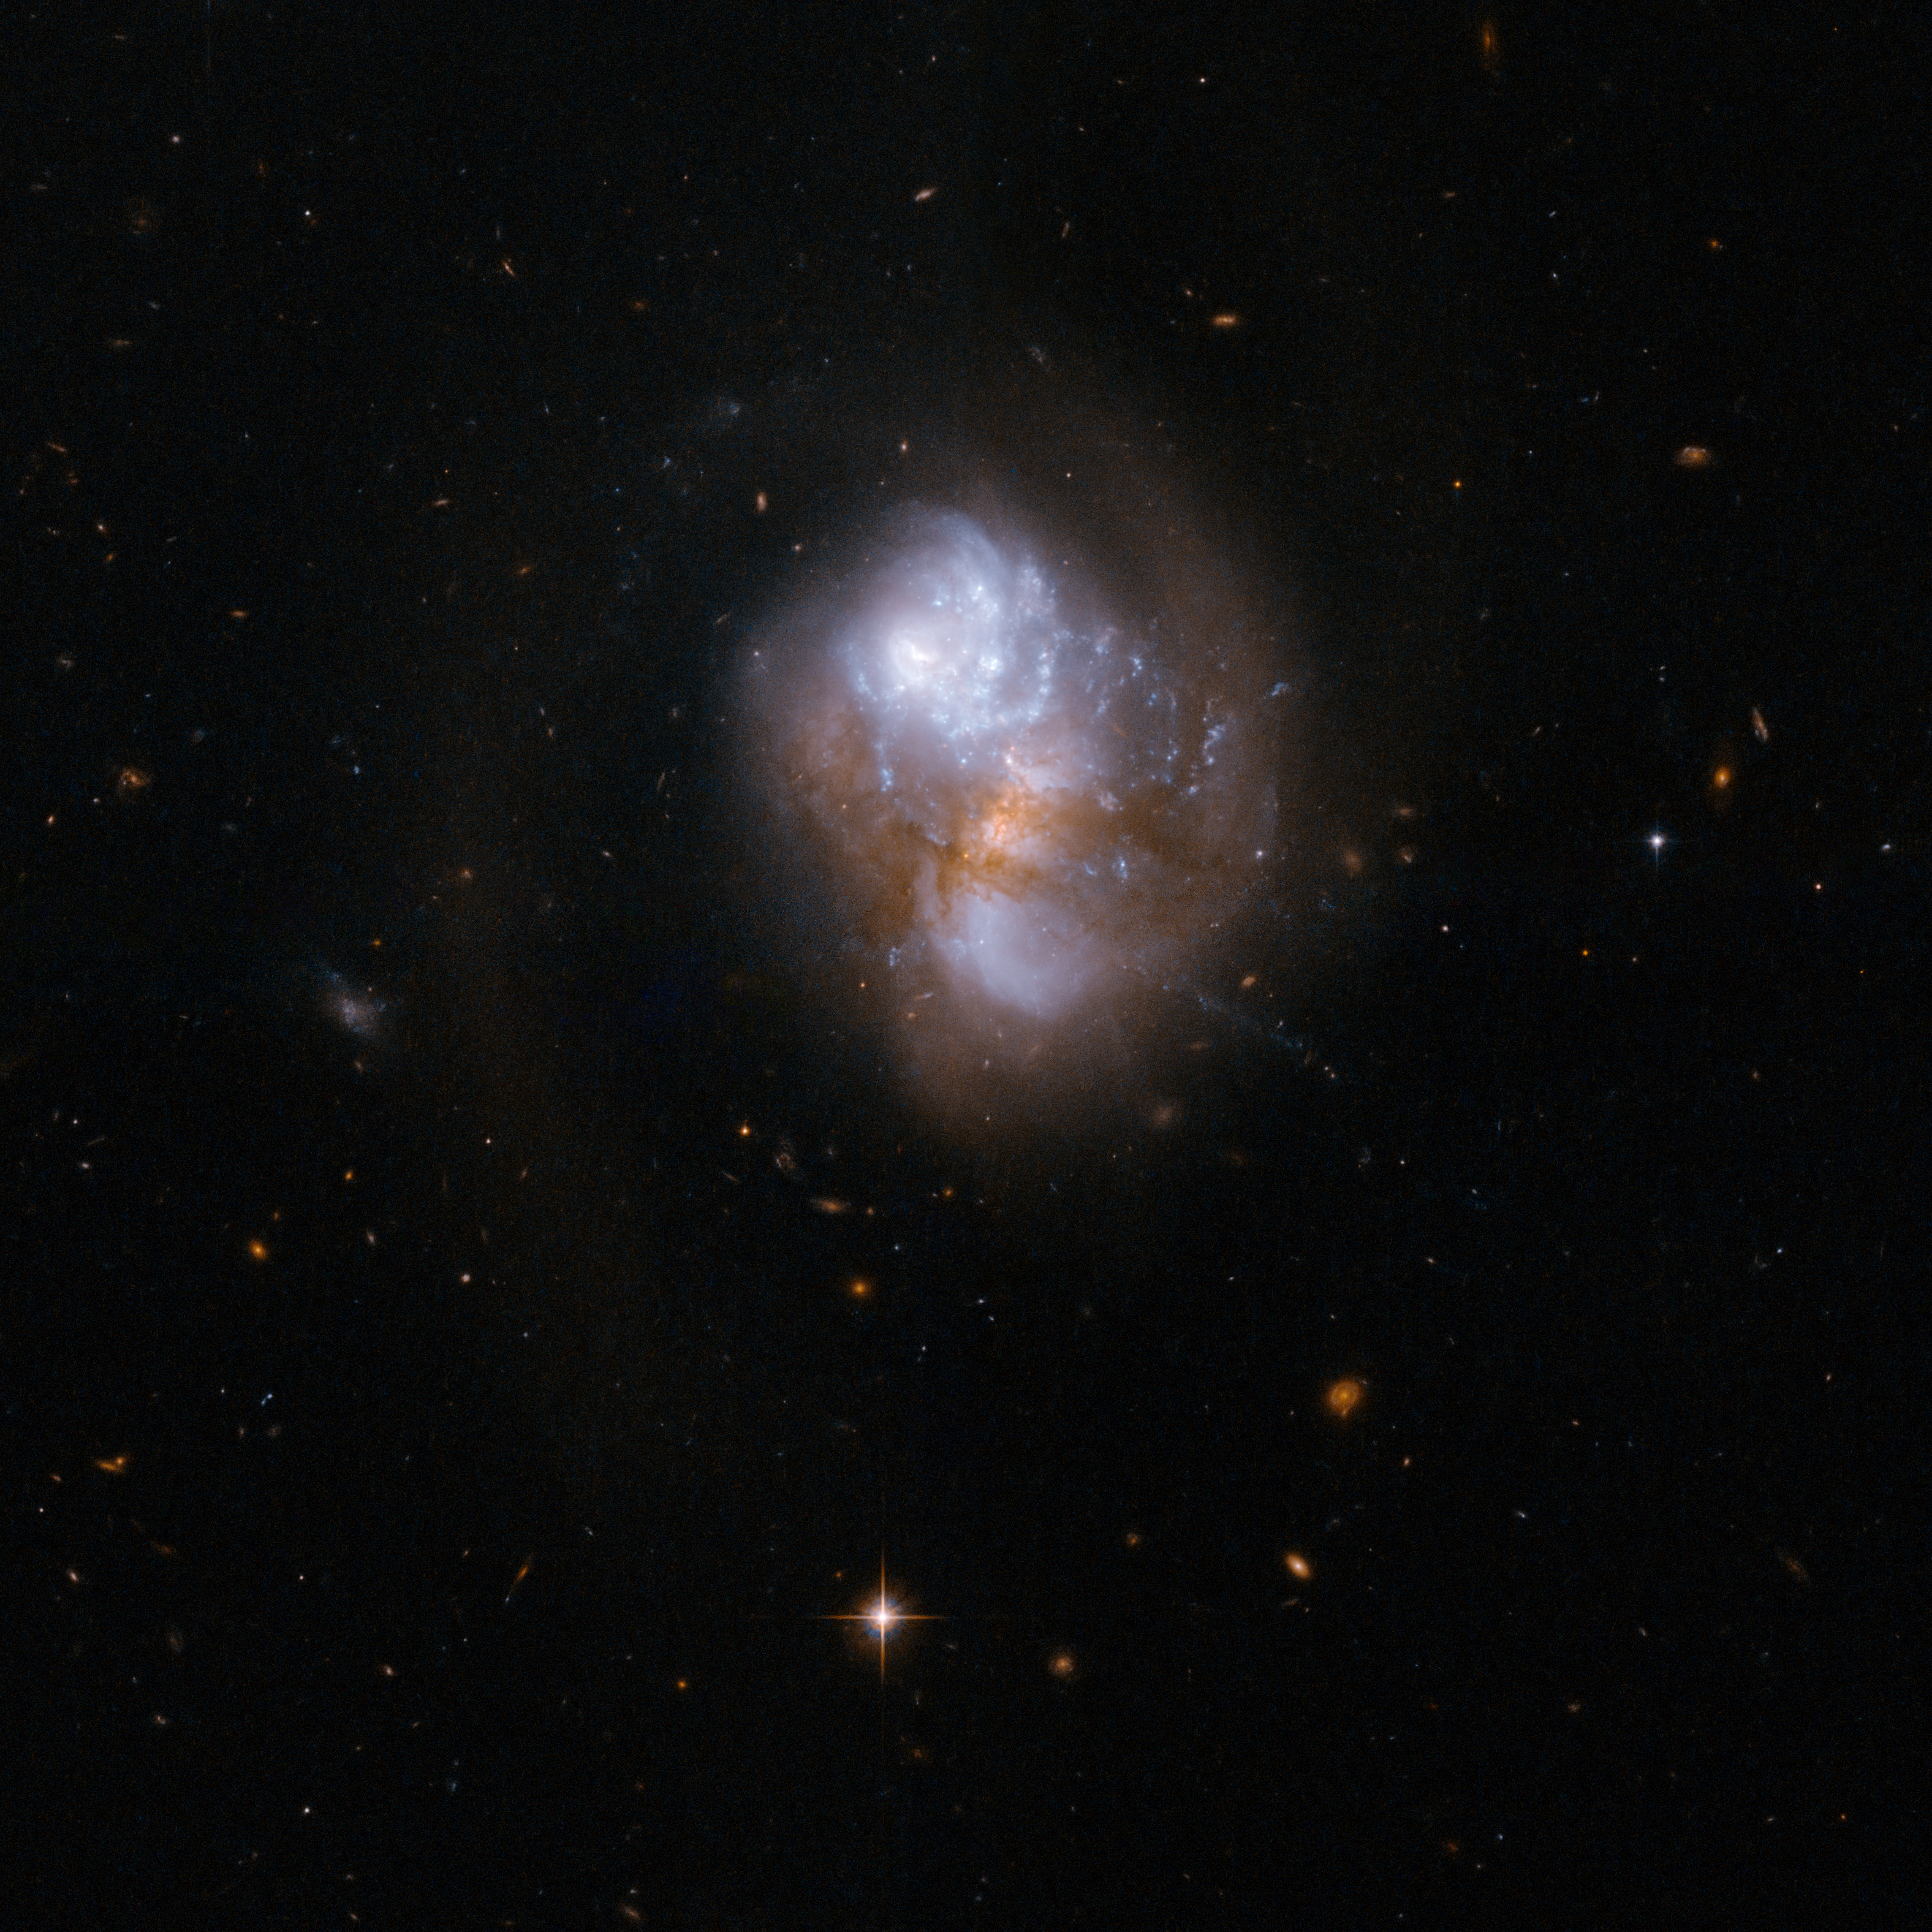

IC 1623

IC 1623 is an interacting galaxy system that is very bright when observed in the infrared. One of the two galaxies, the infrared-bright, but optically obscured galaxy VV 114E, has a substantial amount of warm and dense gas. Warm and dense gas is also found in the overlap region connecting the two nuclei.

Observations further support the notion that IC 1623 is approaching the final stage of its merger, when a violent central inflow of gas will trigger intense starburst activity that could boost the infrared luminosity above the ultraluminous threshold. The system will likely evolve into a compact starburst system similar to Arp 220.

IC 1623 is located about 300 million light-years away from Earth.

This image is part of a large collection of 59 images of merging galaxies taken by the Hubble Space Telescope and released on the occasion of its 18th anniversary on 24th April 2008.

Credit: NASA, ESA, the Hubble Heritage Team (STScI/AURA)-ESA/Hubble Collaboration and A. Evans (University of Virginia, Charlottesville/NRAO/Stony Brook University)